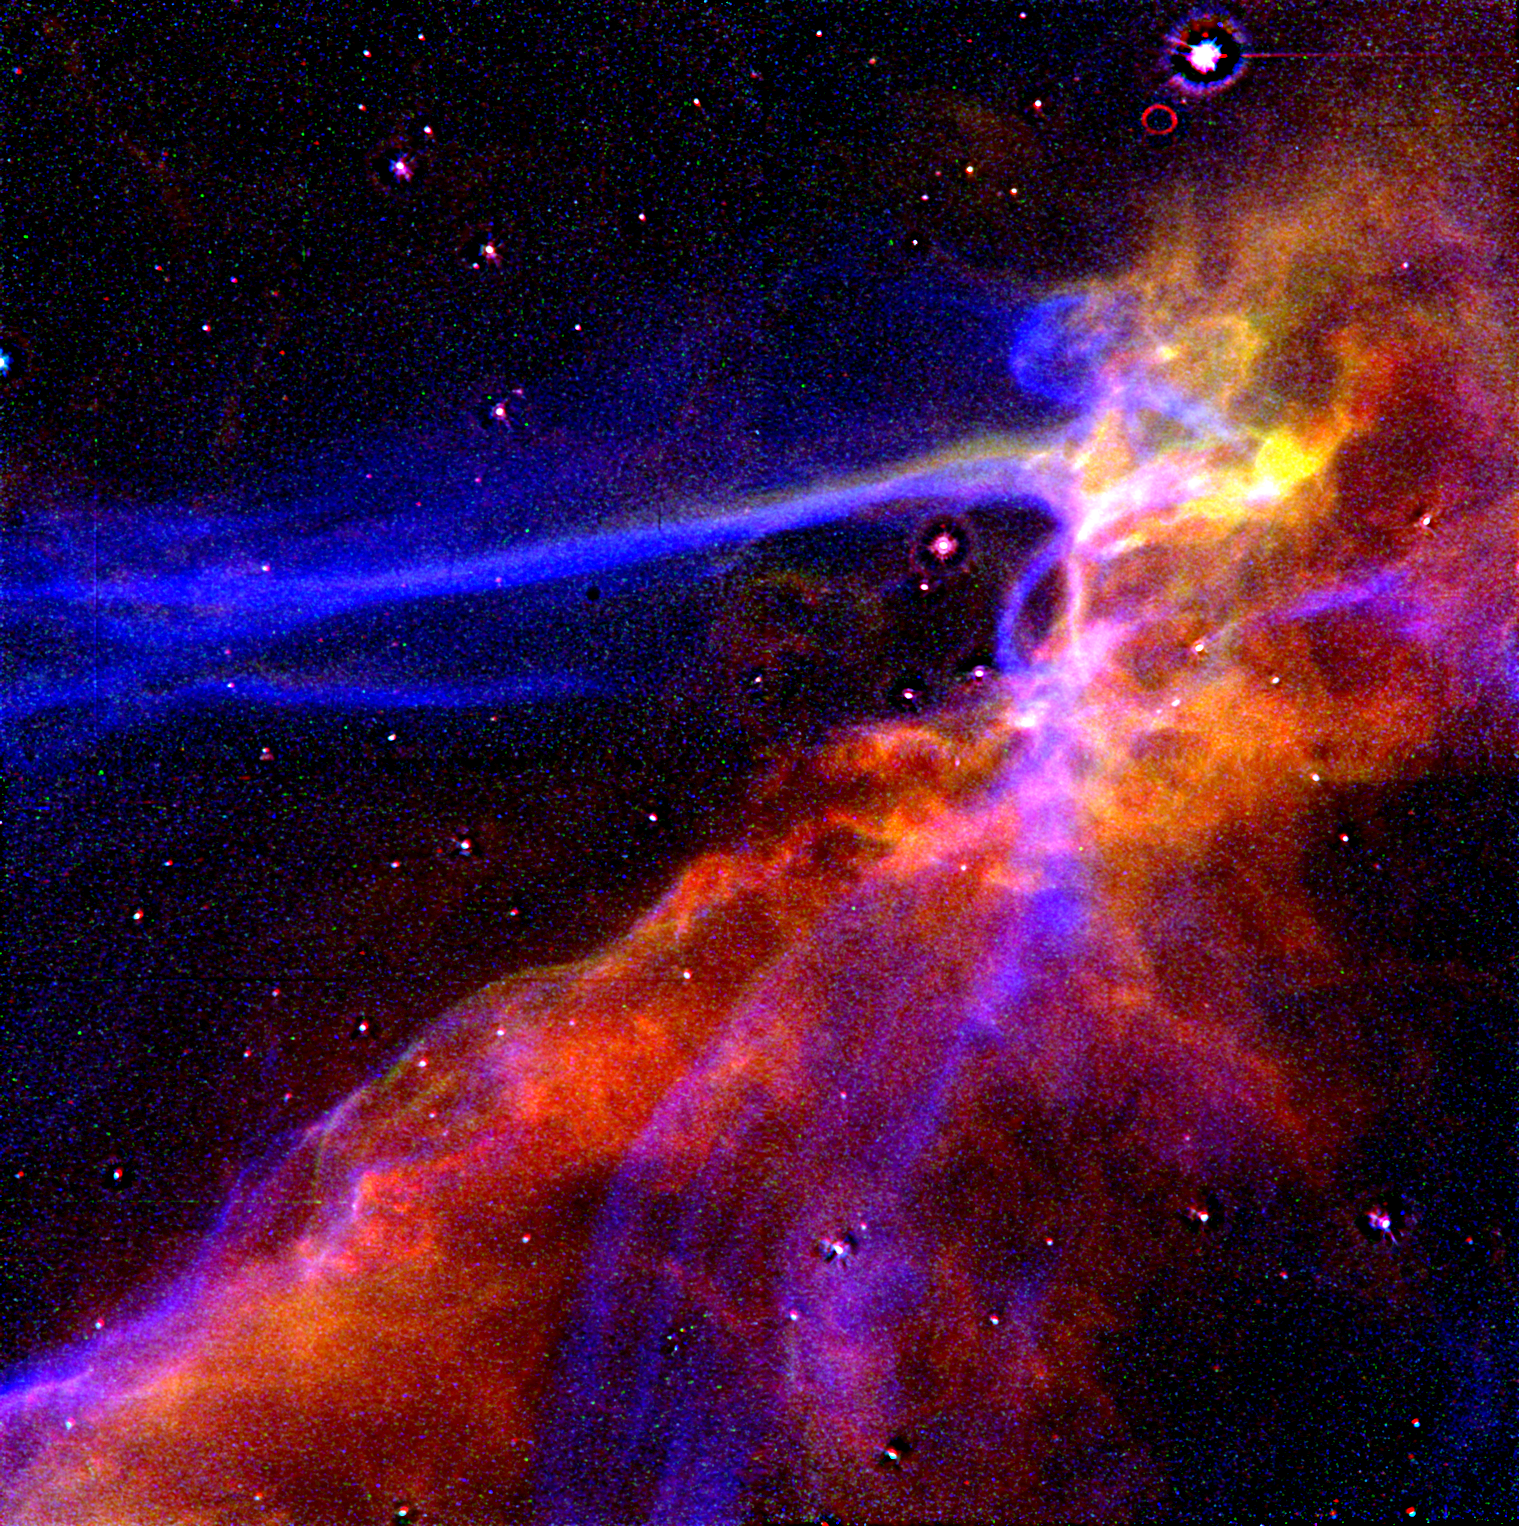

Cygnus Loop

This is an image of a small portion of the Cygnus Loop supernova remnant, taken with the Wide Field and Planetary Camera on NASA's Hubble Space Telescope on April 24, 1991. The Cygnus Loop marks the edge of a bubble-like, expanding blast wave from a colossal stellar explosion which occurred about 15,000 years ago.

Credit: J.J. Hester (Arizona State University), and NASA